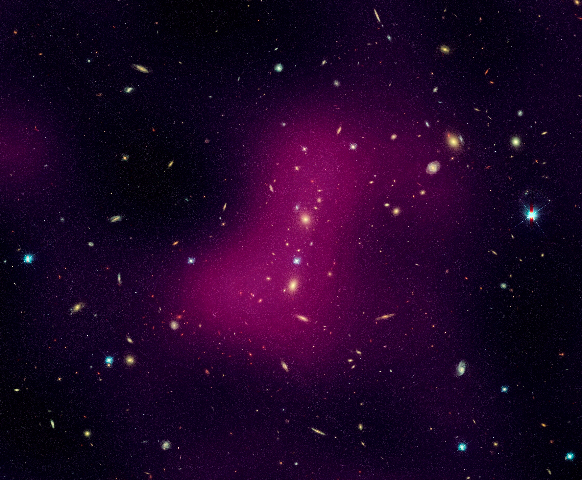

Hubble maps dark matter web in a large galaxy cluster (individual image 2)

A Hubble study pinpointed four main areas in the supercluster where dark matter has pooled into dense clumps. These areas match the location of hundreds of galaxies that have experienced a violent history in their passage from the outskirts of the supercluster into these dense regions. To make this image, astronomers superimposed the dark matter map over a Hubble visible-light image of the supercluster galaxies.

The image is part of the Space Telescope Abell 901/902 Galaxy Evolution Survey (STAGES), which covers one of the largest patches of sky ever observed by the Hubble telescope. The area surveyed is so wide that it took 80 Hubble images to cover the entire field.

Hubble's Advanced Camera for Surveys made the observations in June and July 2005 and in January 2006.

Credit for the Hubble images: NASA, ESA, C. Heymans (University of British Columbia, Vancouver), M. Gray (University of Nottingham, U.K.), M. Barden (Innsbruck), and the STAGES collaboration
Credit for the ground-based image: ESO, C. Wolf (Oxford University, U.K.), K. Meisenheimer (Max-Planck Institute for Astronomy, Heidelberg), and the COMBO-17 collaboration